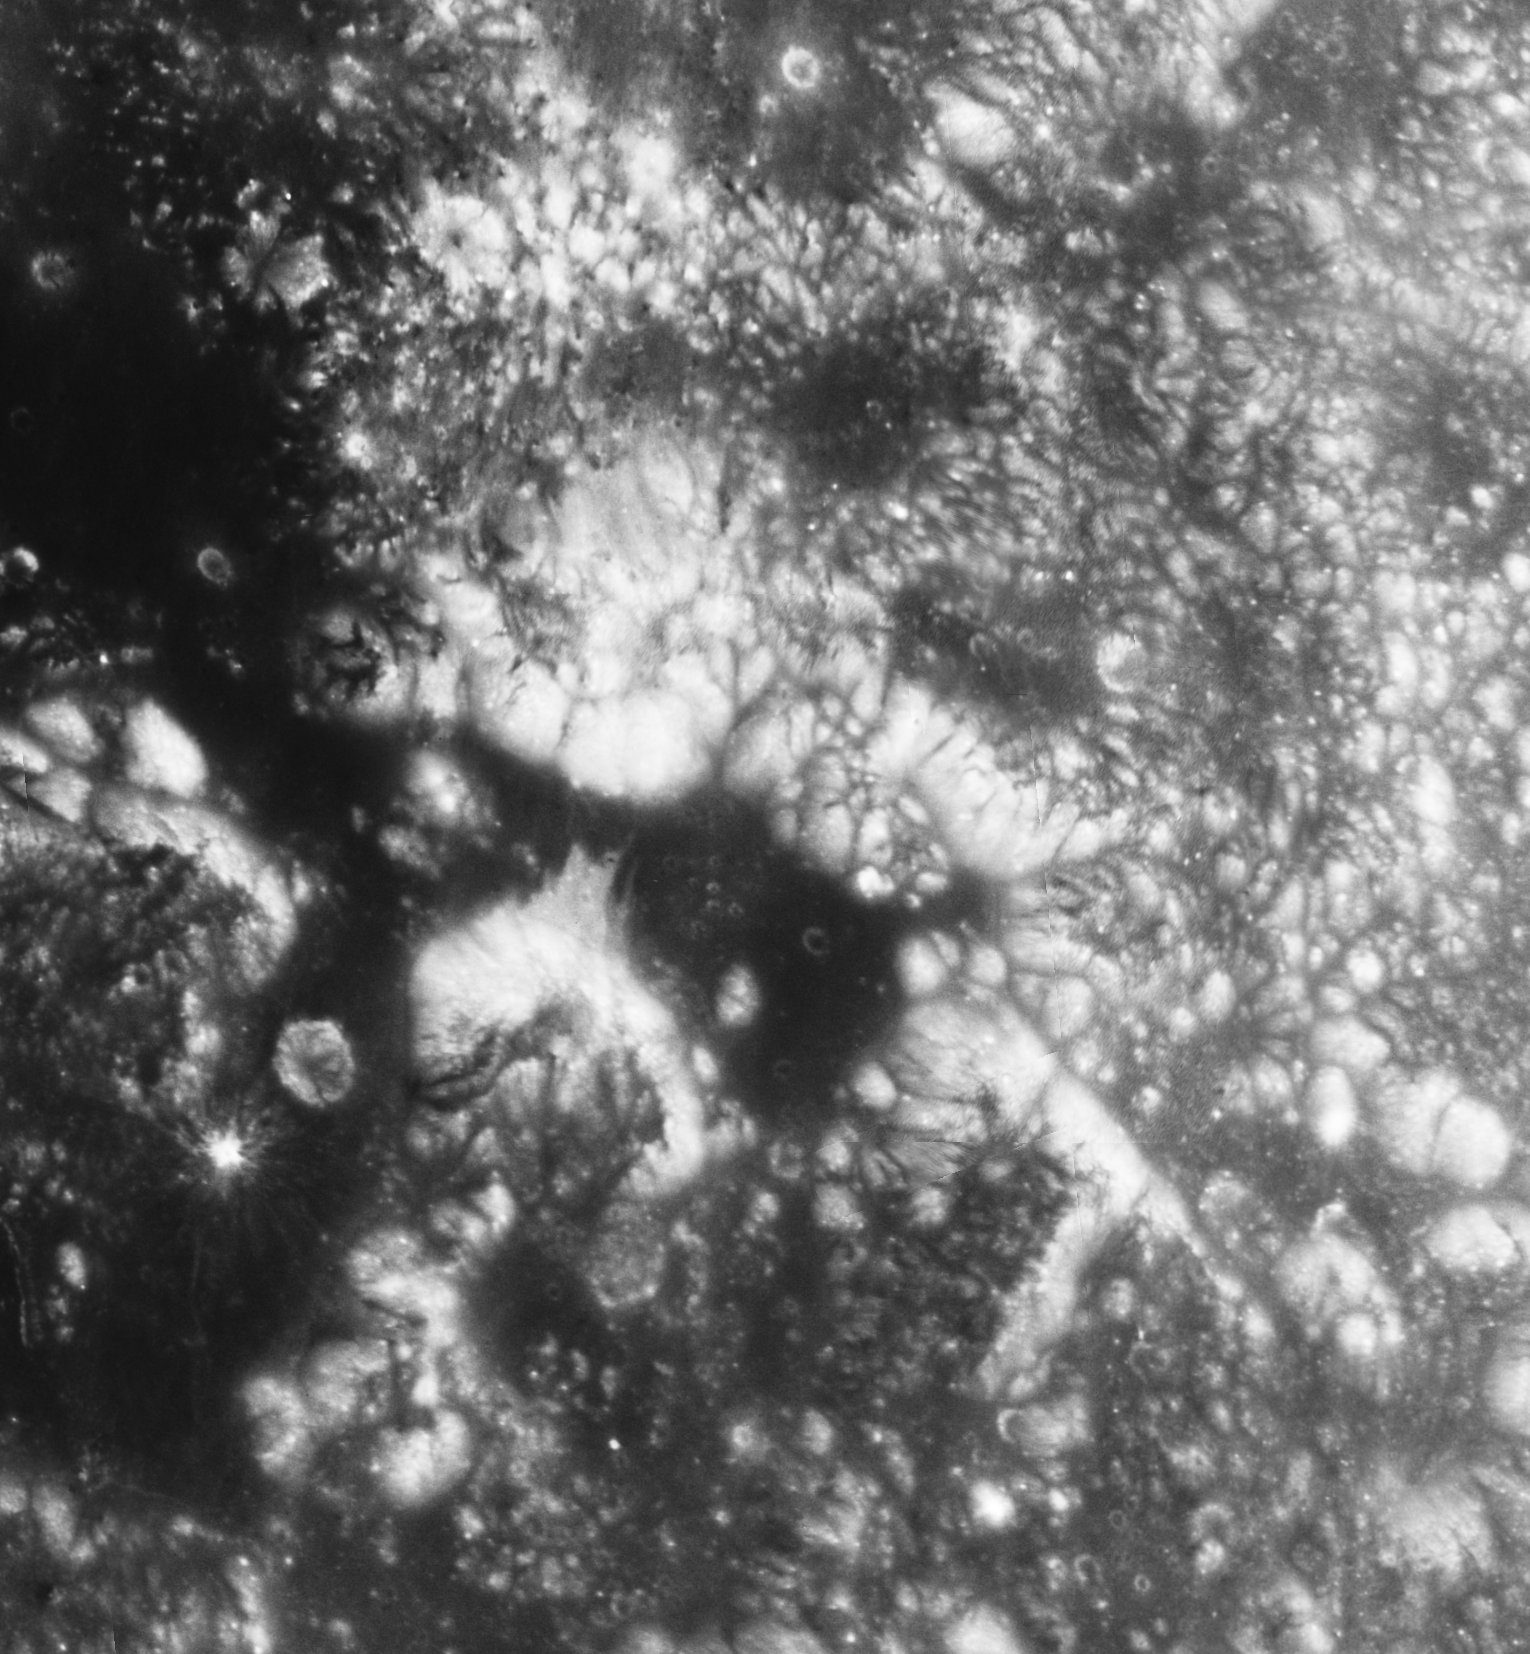

Hubble view of Apollo 17 landing region

This image showcases Hubble Space Telescope's first high-resolution ultraviolet and visible imaging of the Apollo 17 landing region within the Taurus-Littrow valley of the Moon. Humans last walked and drove on the lunar surface in this region (marked "+" in the image) in December 1972. The image was taken Aug. 16, 2005 by Hubble's Advanced Camera for Surveys. North is at the top of the image. The image was processed by the Hubble Space Telescope Lunar Exploration team at NASA's Goddard Space Flight Center, Northwestern University, and the Space Telescope Science Institute.

Credit: NASA, ESA, and J. Garvin (NASA/GSFC)